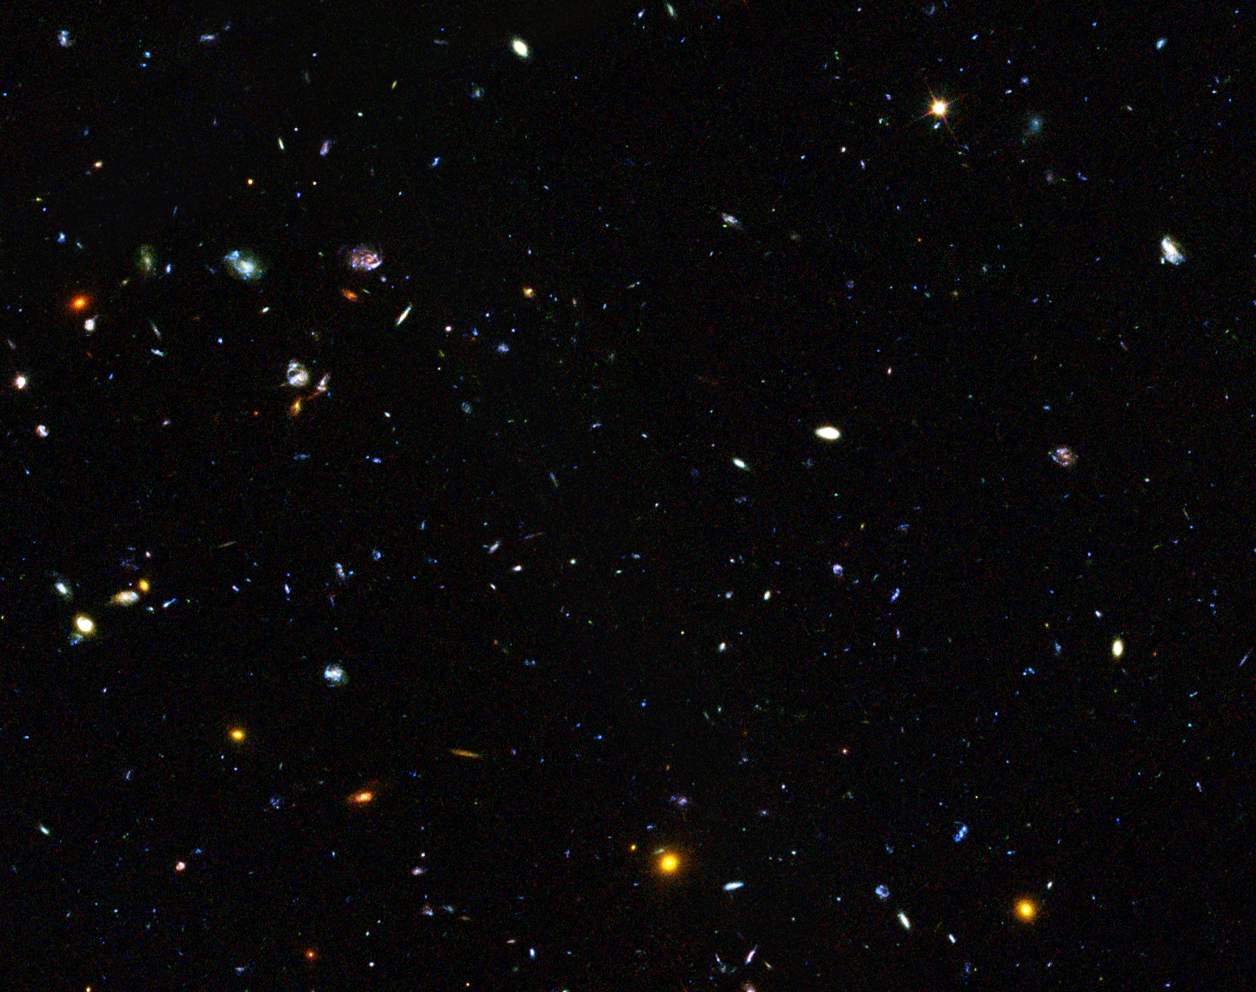

GOODS field containing distant dwarf galaxies forming stars at an incredible rate

This image shows a region of space containing a sample of dwarf galaxies studied by the NASA/ESA Hubble Space Telescope to unlock the secrets of star formation in the early Universe.

Hiding amongst these thousands of galaxies are faint dwarf galaxies that reside in the early Universe, between two and six billion years after the Big Bang, an important time period when most of the stars in the Universe were formed. Some of these galaxies are undergoing starbursts and have been studied by astronomers to deduce their contribution to star formation in this crucial era of the Universe’s history.

The image is part of the Great Observatories Origins Deep Survey (GOODS), and this image shows only one section that the survey covered.

Credit: NASA, ESA, the GOODS Team and M. Giavalisco (STScI/University of Massachusetts)